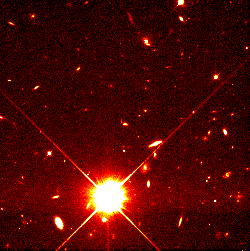

Distant Supernova 1997ce

These supernovae belong to a class called Type Ia, which are considered reliable distance indicators. Looking at great distances also means looking back in time because of the finite velocity of light.

Credit: Peter Garnavich, Harvard-Smithsonian Center for Astrophysics, the High-z Supernova Search Team, and NASA/ESA